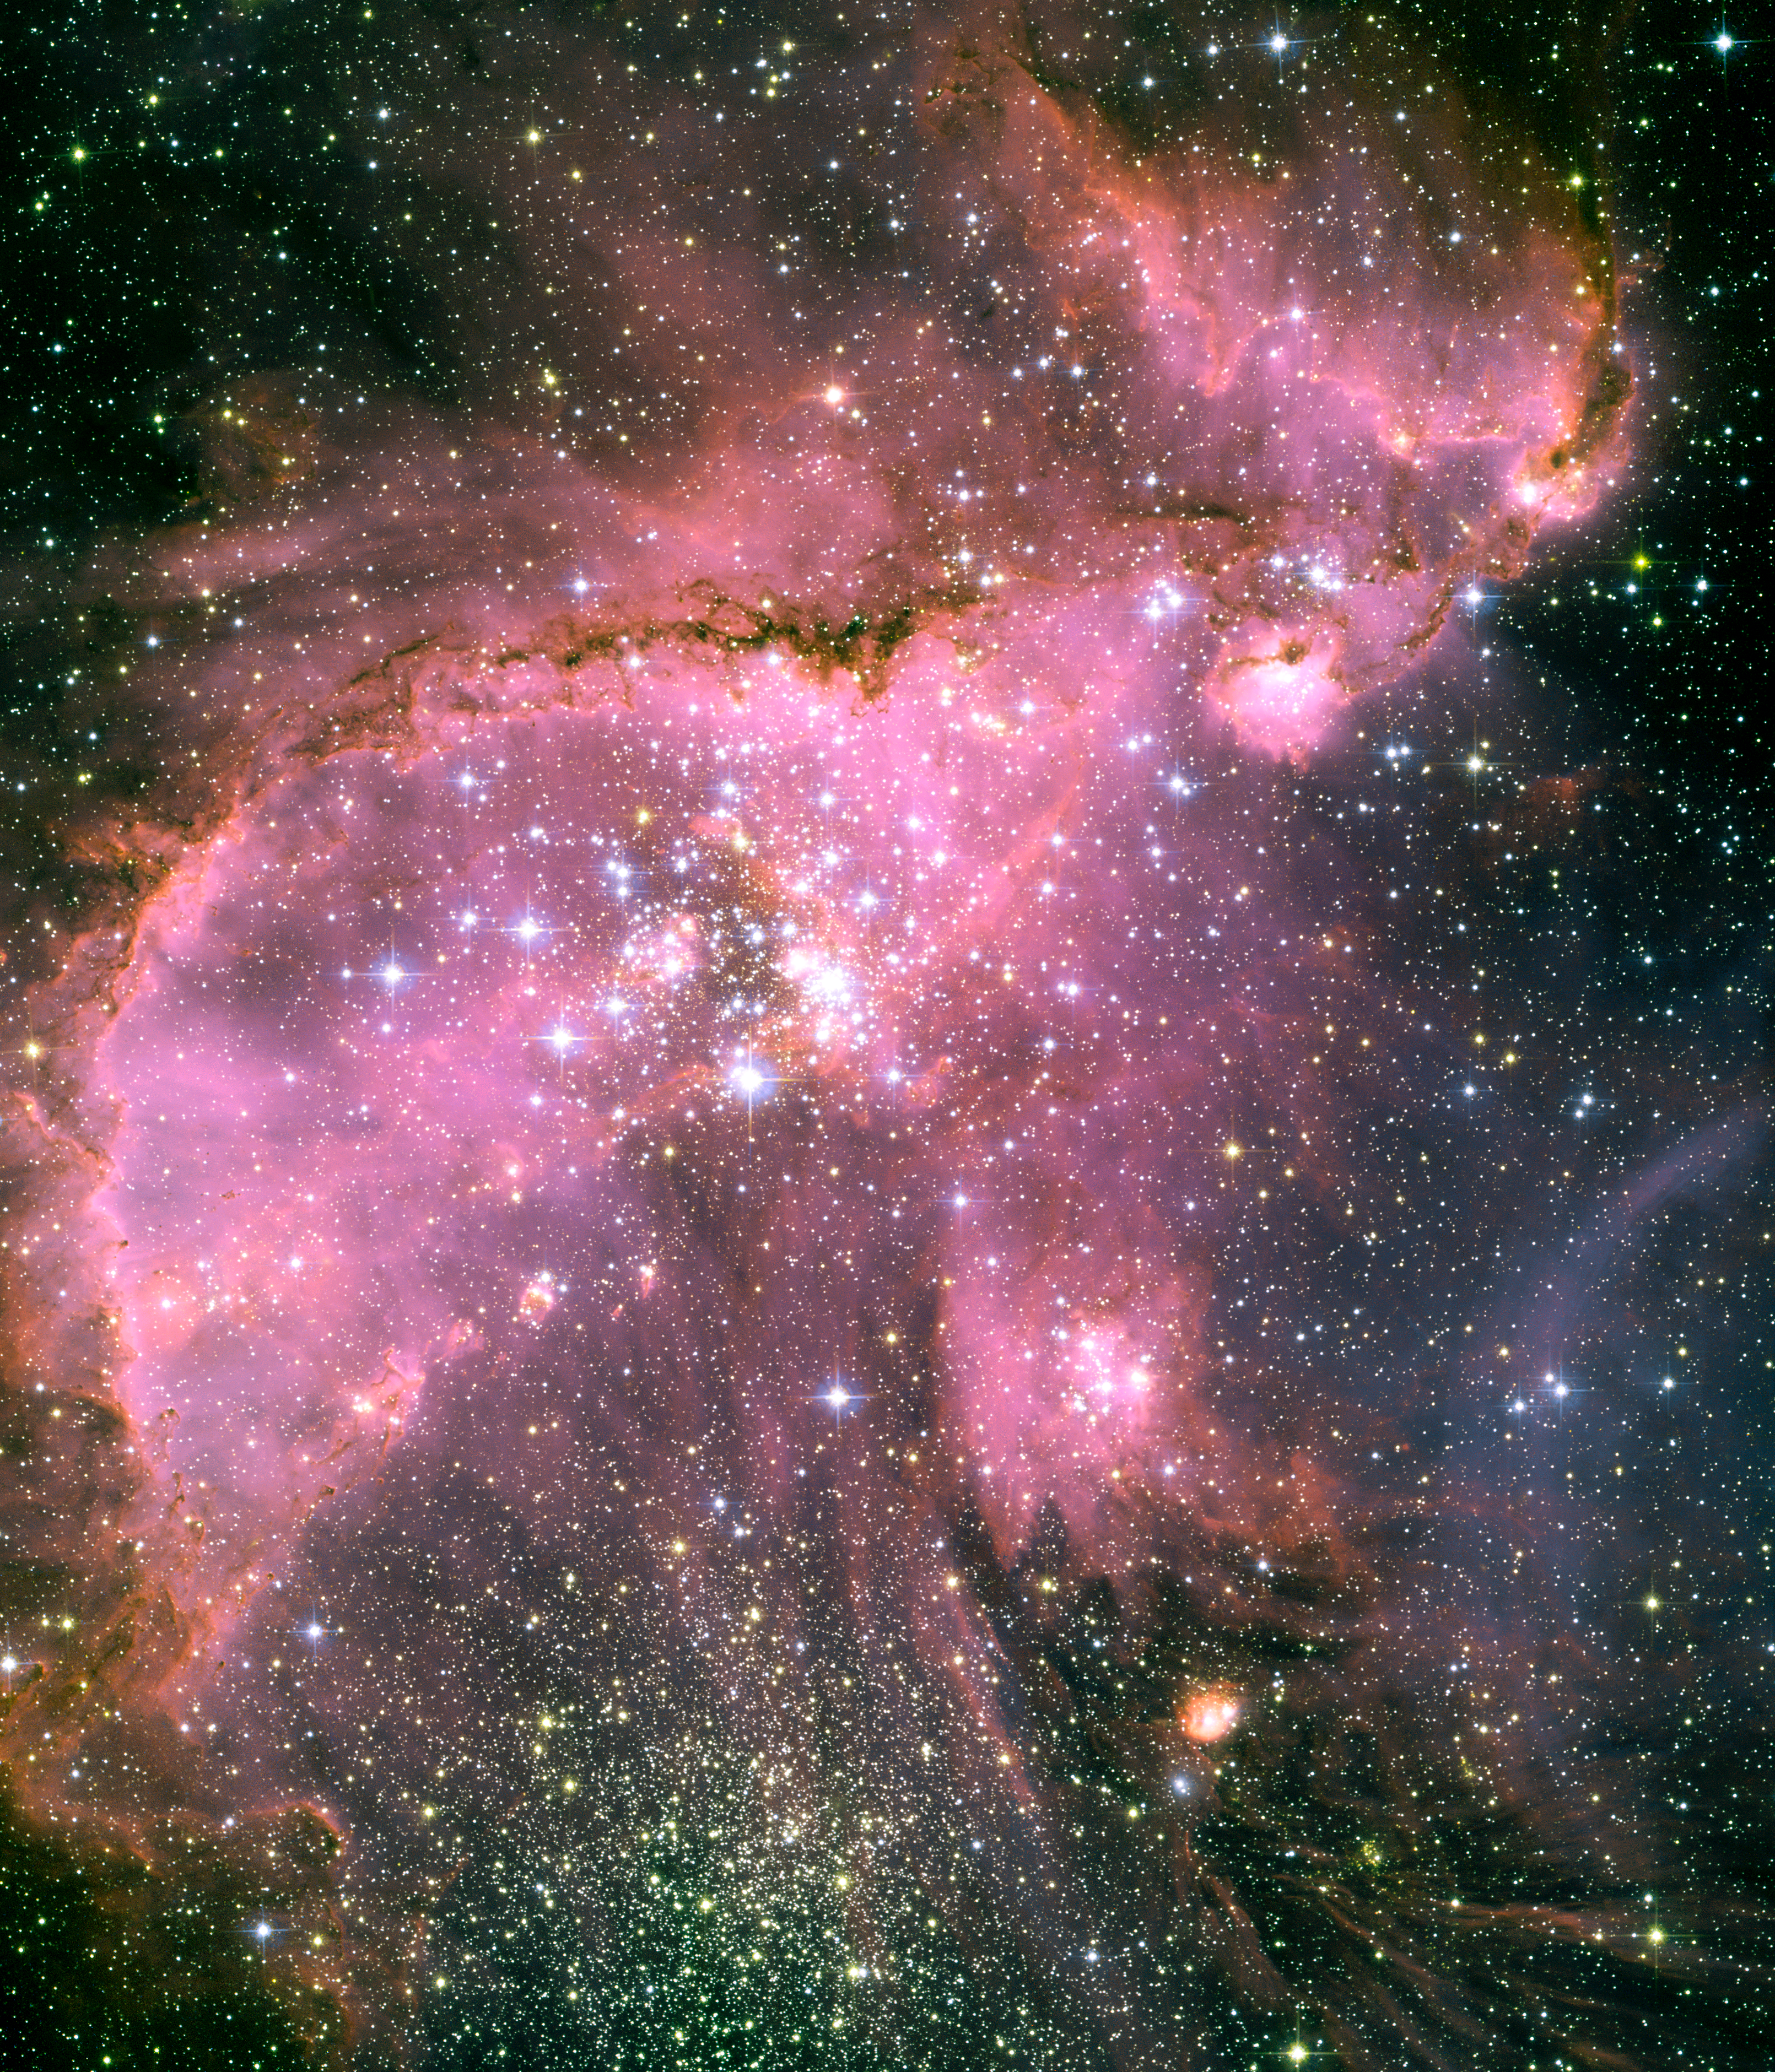

Young stars sculpt gas with powerful outflows

This Hubble Space Telescope view shows one of the most dynamic and intricately detailed star-forming regions in space, located 210,000 light-years away in the Small Magellanic Cloud (SMC), a satellite galaxy of our Milky Way. At the centre of the region is a brilliant star cluster called NGC 346. A dramatic structure of arched, ragged filaments with a distinct ridge surrounds the cluster.

A torrent of radiation from the hot stars in the cluster NGC 346, at the centre of this Hubble image, eats into denser areas around it, creating a fantasy sculpture of dust and gas. The dark, intricately beaded edge of the ridge, seen in silhouette, is particularly dramatic. It contains several small dust globules that point back towards the central cluster, like windsocks caught in a gale.

Credit: NASA, ESA and A. Nota (ESA/STScI, STScI/AURA)